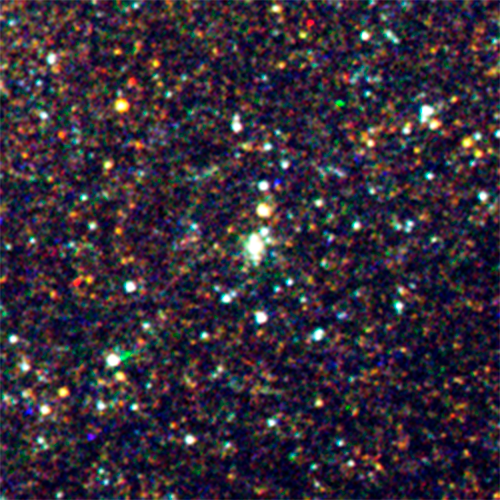

Supernova 1993J

This image shows the supernova 1993J which is situated inside the majestic spiral galaxy M81. It can be seen in situ in the annotated image.

Though astronomers saw the star explode as a supernova 21 years ago, the glow of that explosion is still present, as seen here. The supernova has faded to the point where astronomers are confident that they have picked up the ultraviolet glow of a very hot companion star. This is the first time astronomers have been able to put constraints on the properties of the companion star in this unusual class of supernova called Type IIb. Hubble observations in ultraviolet light confirm the theory that the explosion originated in a double-star system where one star fueled the mass-loss from the aging primary star.

Credit: NASA, ESA, and O. Fox (University of California, Berkeley), A. Bostroem (STScI), S. Van Dyk (Caltech), A. Filippenko (University of California, Berkeley), C. Fransson (Stockholm University), T. Matheson (NOAO), S. Cenko (University of California, Berkeley, and NASA/GSFC), P. Chandra (National Center for Radio Astrophysics/Pune University, India), V. Dwarkadas (University of Chicago), W. Li and A. Parker (University of California, Berkeley), and N. Smith (Steward Observatory)